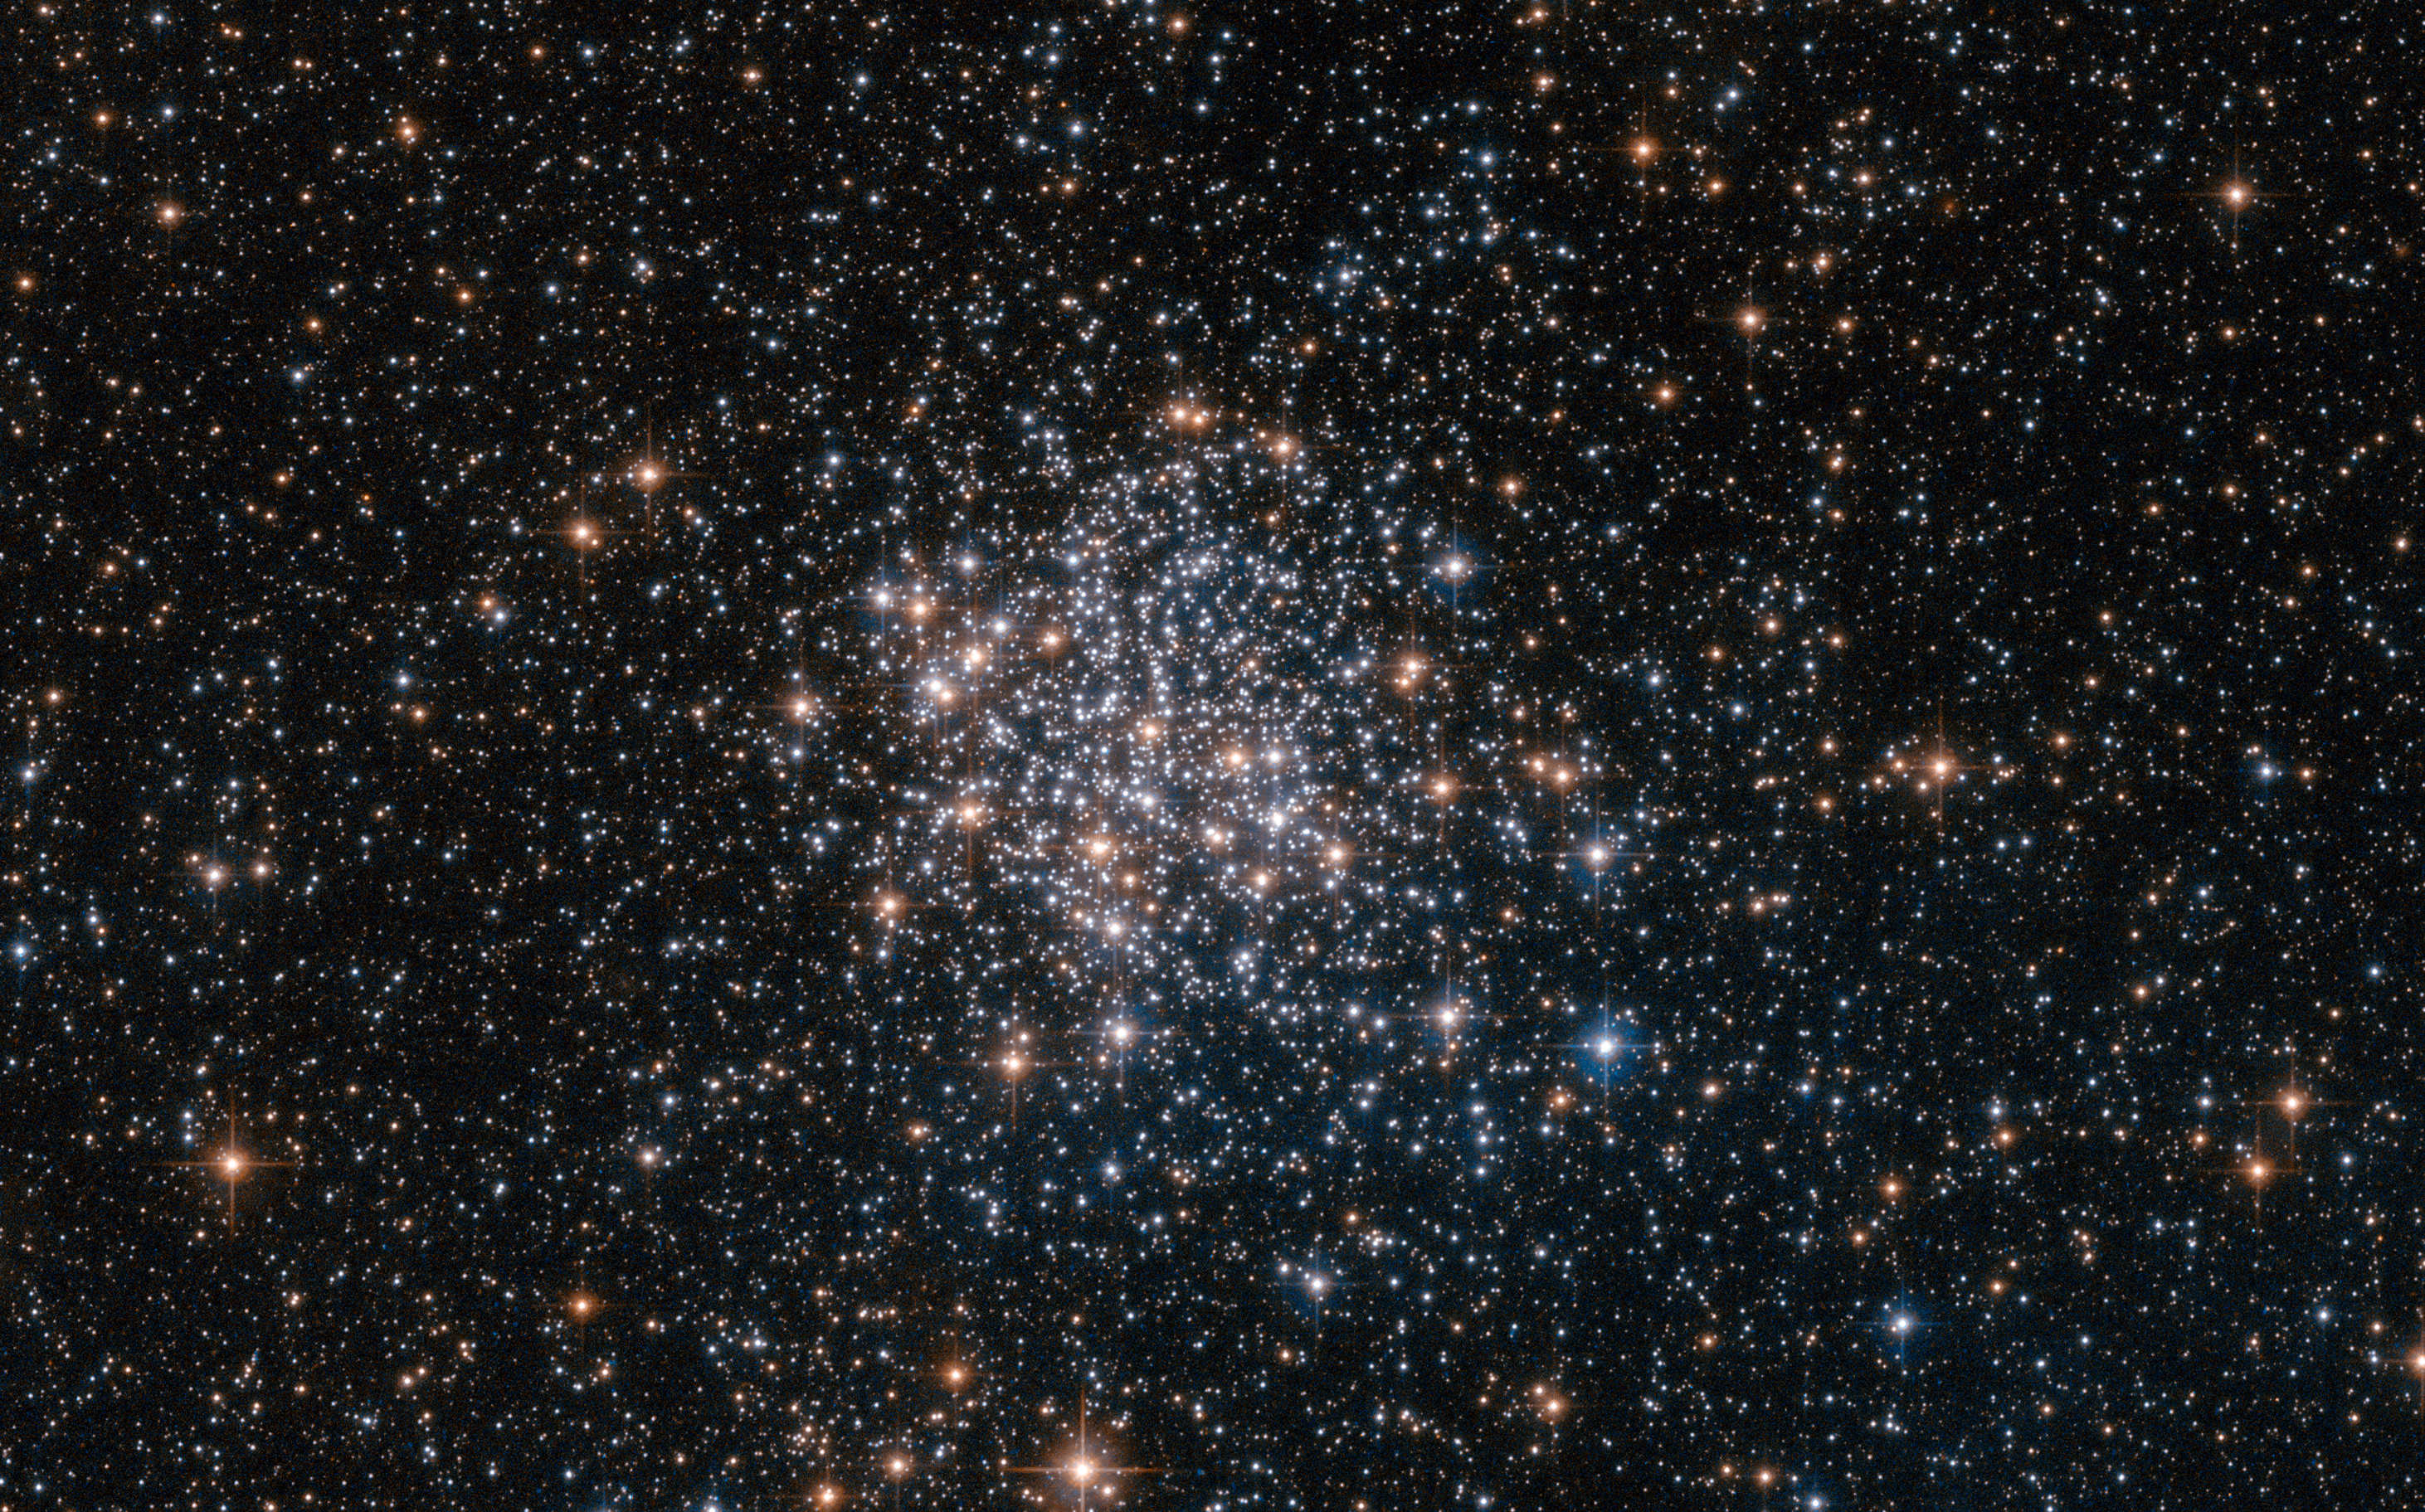

The stars of the Large Magellanic Cloud

This NASA/ESA Hubble Space Telescope image shows the globular cluster NGC 1854, a gathering of white and blue stars in the southern constellation of Dorado (The Dolphinfish). NGC 1854 is located about 135 000 light-years away, in the Large Magellanic Cloud (LMC), one of our closest cosmic neighbours and a satellite galaxy of the Milky Way.

The LMC is a hotbed of vigorous star formation. Rich in interstellar gas and dust, the galaxy is home to approximately 60 globular clusters and 700 open clusters. These clusters are frequently the subject of astronomical research, as the Large Magellanic Cloud and its little sister, the Small Magellanic Cloud, are the only systems known to contain clusters at all stages of evolution. Hubble is often used to study these clusters as its extremely high-resolution cameras can resolve individual stars, even at the clusters’ crowded cores, revealing their mass, size and degree of evolution.

Credit: ESA/Hubble & NASA